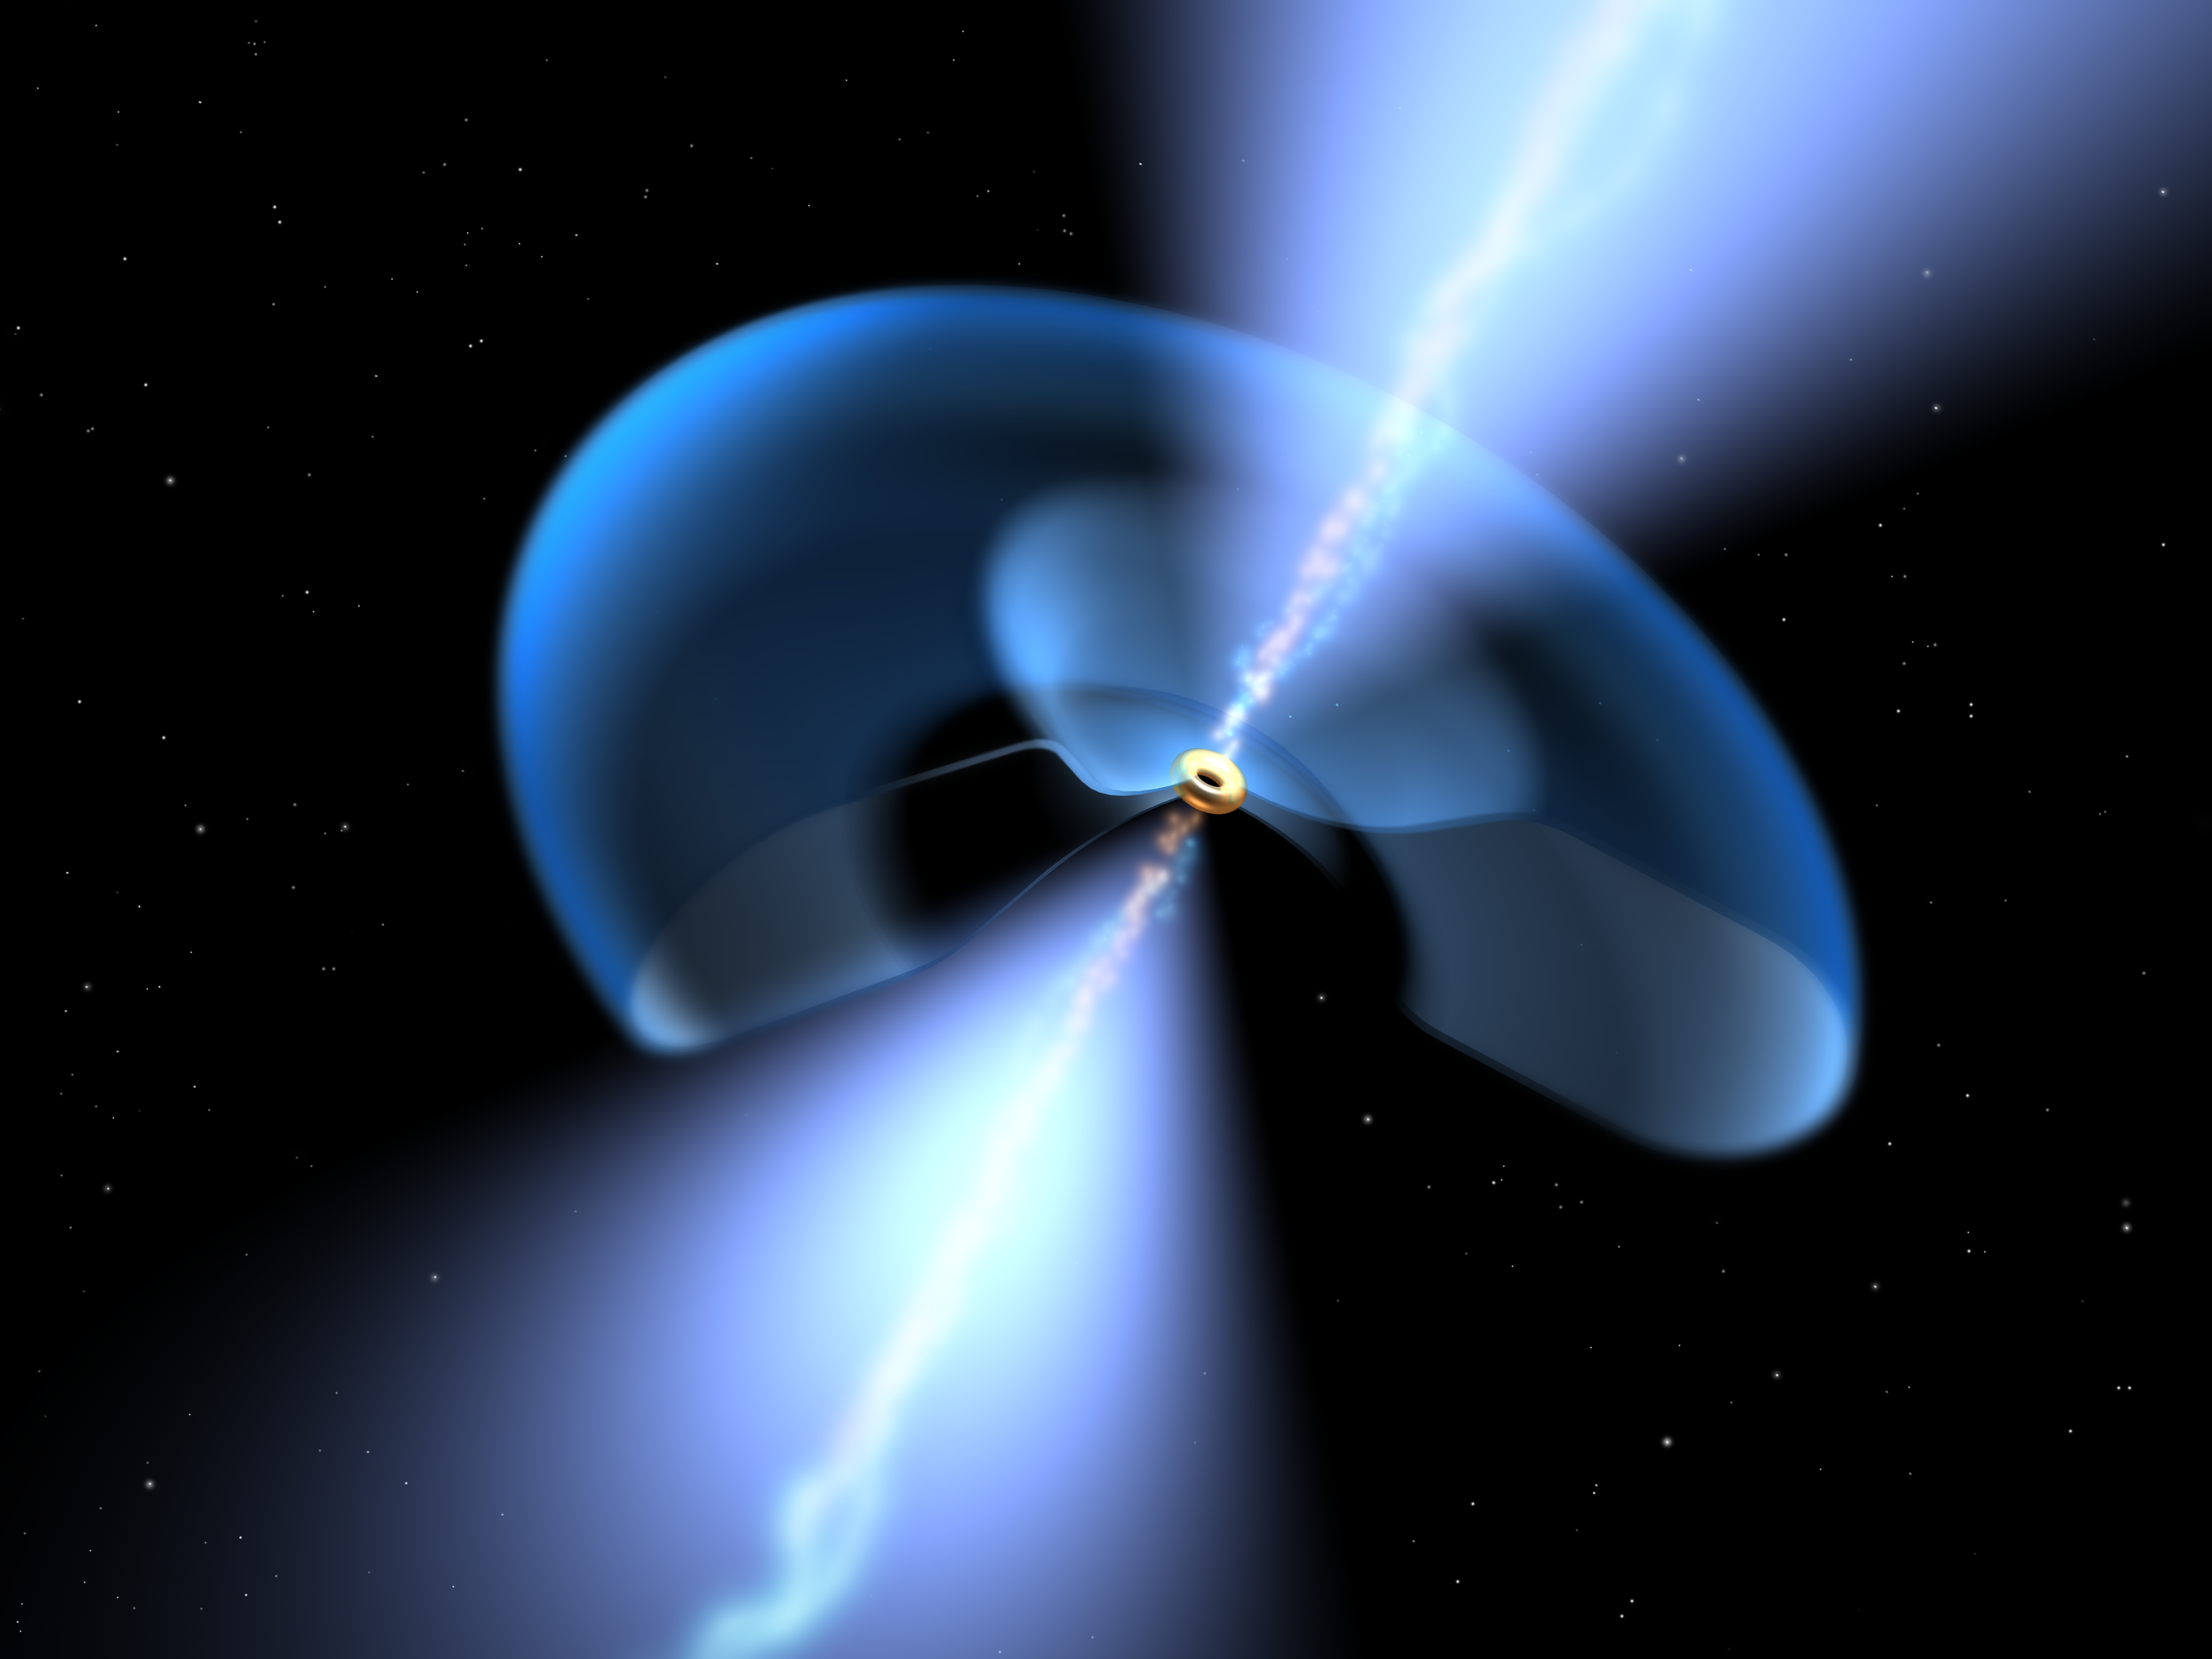

Dissecting a dusty black hole (artist's impression)

This illustration allows a peek into the inner workings of a dusty supermassive black hole. In the centre the black hole is seen surrounded by an accretion disk (yellow). Further out the dust torus is shown in blue. Two jets are emanating from the inner regions.

Credit: ESA/NASA, the AVO project and Paolo Padovani